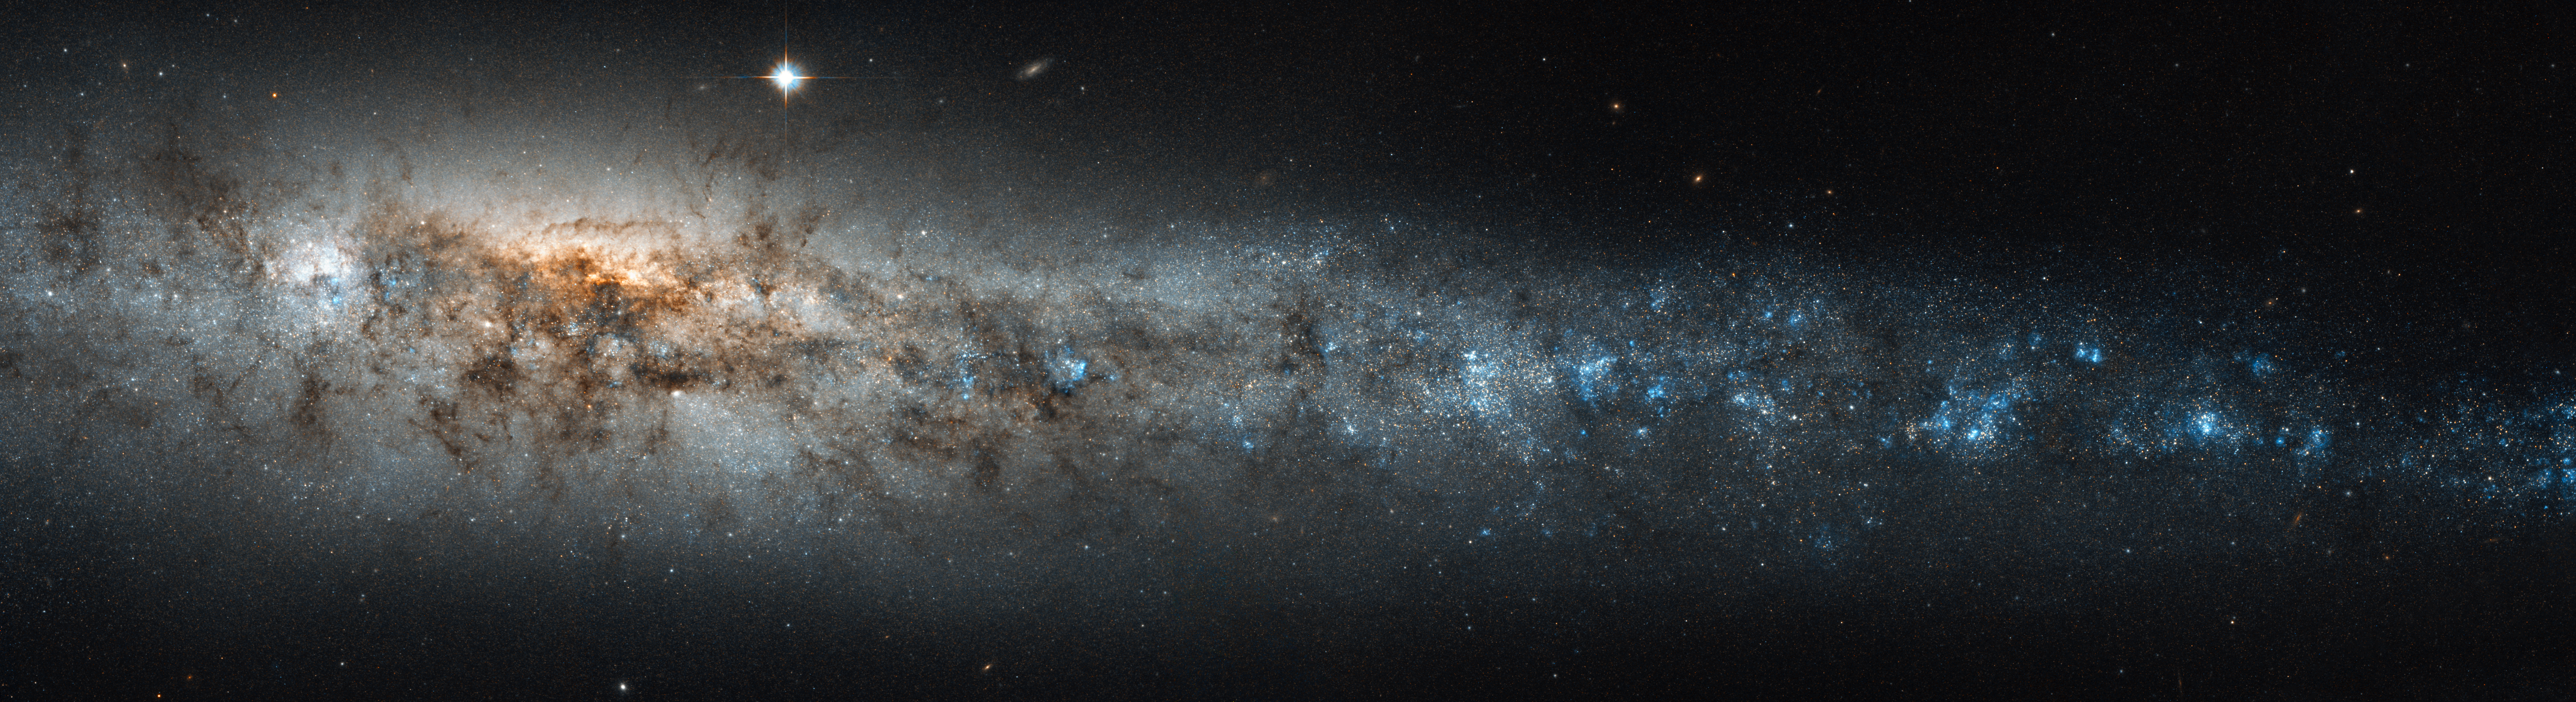

The belly of the cosmic whale

The NASA/ESA Hubble Space Telescope has peered deep into NGC 4631, better known as the Whale Galaxy. Here, a profusion of starbirth lights up the galactic centre, revealing bands of dark material between us and the starburst. The galaxy’s activity tapers off in its outer regions where there are fewer stars and less dust, but these are still punctuated by pockets of star formation.

The Whale Galaxy is about 30 million light-years away from us in the constellation of Canes Venatici (The Hunting Dogs) and is a spiral galaxy much like the Milky Way. From our vantage point, however, we see the Whale Galaxy edge-on, seeing its glowing centre through dusty spiral arms. The galaxy's central bulge and asymmetric tapering disc have suggested the shape of a whale or a herring to past observers.

Many supernovae — the explosions of hot, blue, short-lived stars at least eight times the mass of the Sun — have gone off in the core of the Whale Galaxy. The stellar pyrotechnics have bathed the galaxy in hot gas, visible to X-ray telescopes like ESA’s XMM–Newton. Comparing the optical and near-infrared observations from Hubble with other telescopes sensitive to different wavelengths of light helps astronomers gather the full story behind celestial phenomena.

From such work, the triggers of the starburst in the Whale Galaxy and others can be elucidated. The gravitational "feeding" on intergalactic material, as well as clumping caused by the gravitational interactions with its galactic neighbours, creates the areas of greater density where stars start to coalesce. Just as blue whales, the biggest creatures on Earth, can gorge themselves on comparatively tiny bits of plankton, so the Whale Galaxy has become filled with the gas and dust that powers a high rate of star formation.

Credit: NASA & ESA